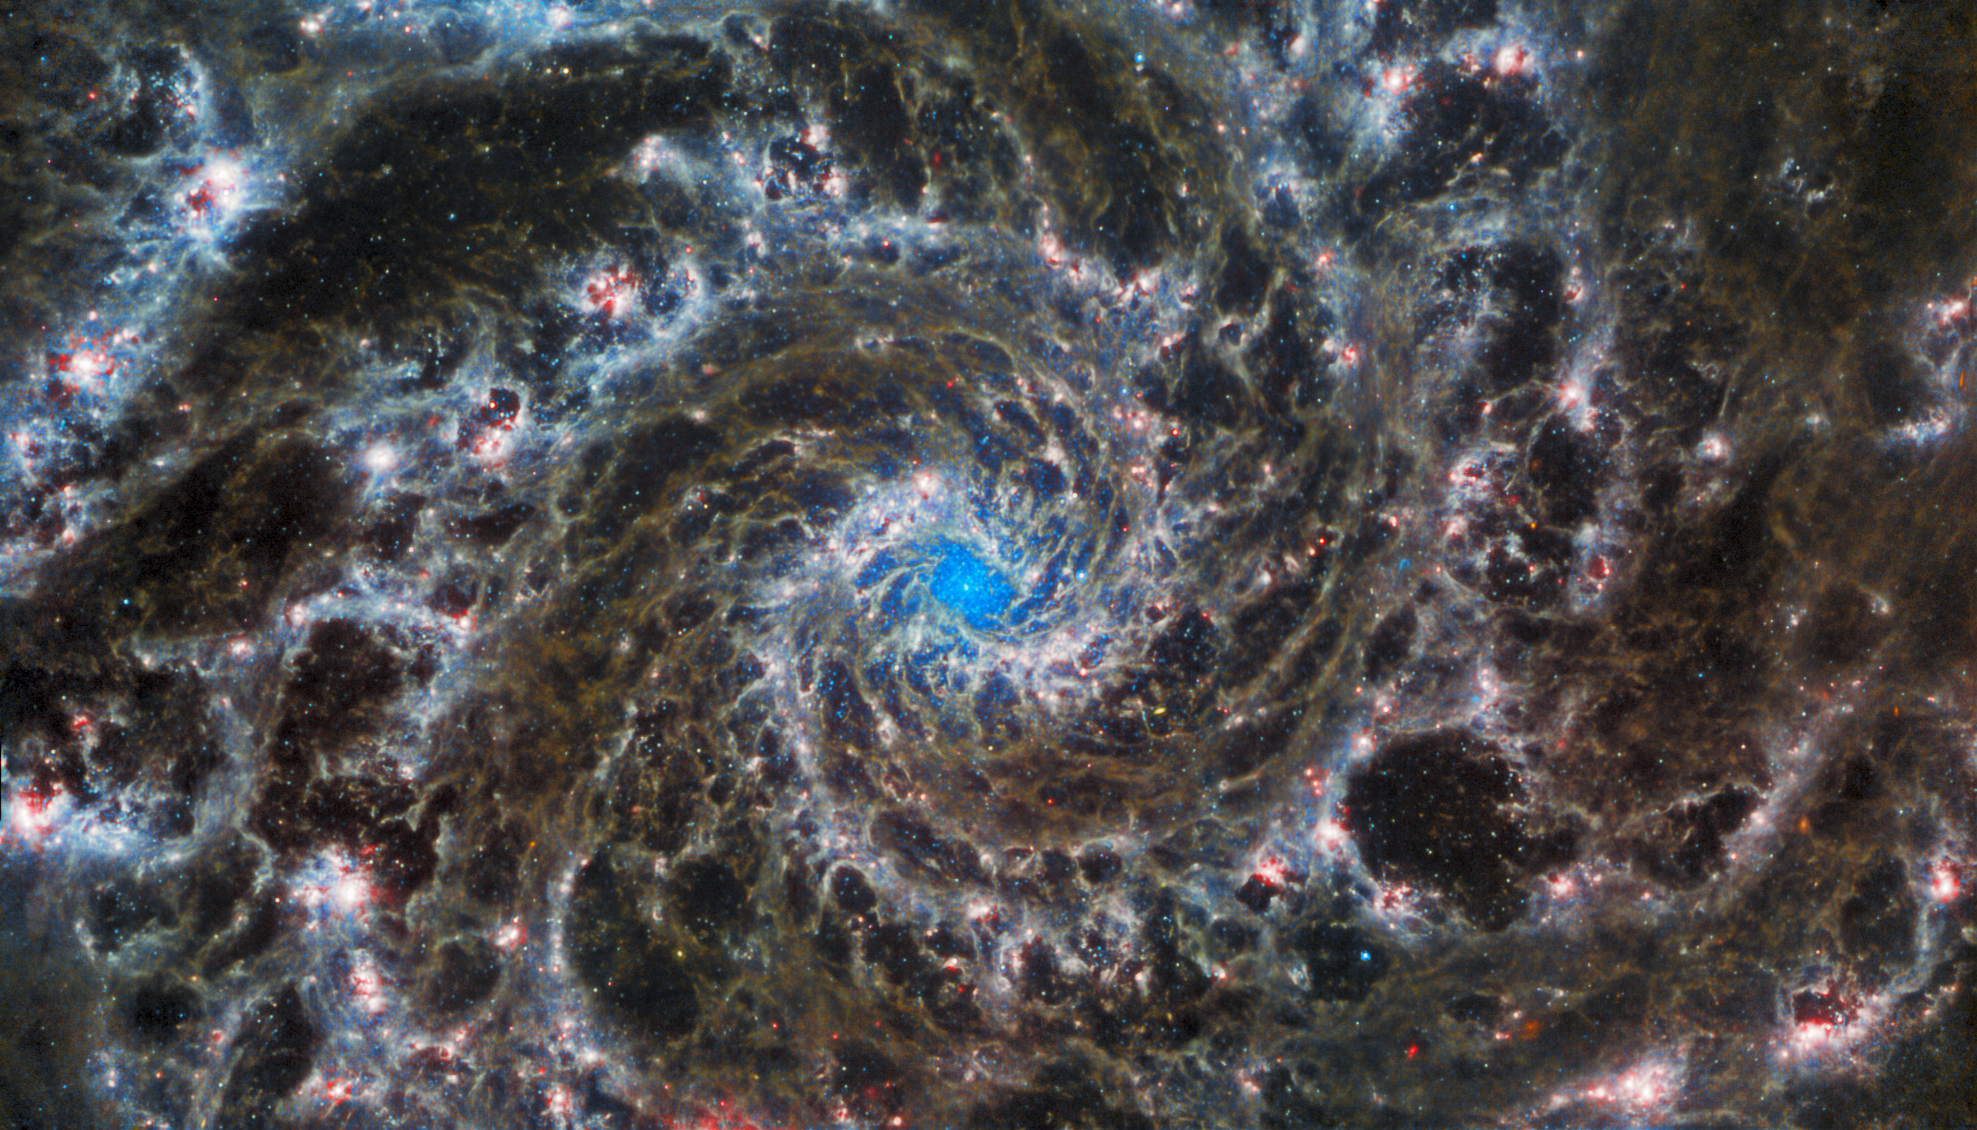

Webb Inspects the Heart of the Phantom Galaxy

This image from the NASA/ESA/CSA James Webb Space Telescope shows the heart of M74, otherwise known as the Phantom Galaxy. Webb’s sharp vision has revealed delicate filaments of gas and dust in the grandiose spiral arms which wind outwards from the centre of this image. A lack of gas in the nuclear region also provides an unobscured view of the nuclear star cluster at the galaxy's centre. M74 is a particular class of spiral galaxy known as a ‘grand design spiral’, meaning that its spiral arms are prominent and well-defined, unlike the patchy and ragged structure seen in some spiral galaxies.

The Phantom Galaxy is around 32 million light-years away from Earth in the constellation Pisces, and lies almost face-on to Earth. This, coupled with its well-defined spiral arms, makes it a favourite target for astronomers studying the origin and structure of galactic spirals.

Webb gazed into M74 with its Mid-InfraRed Instrument (MIRI) in order to learn more about the earliest phases of star formation in the local Universe. These observations are part of a larger effort to chart 19 nearby star-forming galaxies in the infrared by the international PHANGS collaboration. Those galaxies have already been observed using the NASA/ESA Hubble Space Telescope and ground-based observatories. The addition of crystal-clear Webb observations at longer wavelengths will allow astronomers to pinpoint star-forming regions in the galaxies, accurately measure the masses and ages of star clusters, and gain insights into the nature of the small grains of dust drifting in interstellar space.

Hubble observations of M74 have revealed particularly bright areas of star formation known as HII regions. Hubble’s sharp vision at ultraviolet and visible wavelengths complements Webb’s unparalleled sensitivity at infrared wavelengths, as do observations from ground-based radio telescopes such as the Atacama Large Millimeter/submillimeter Array, ALMA. By combining data from telescopes operating across the electromagnetic spectrum, scientists can gain greater insight into astronomical objects than by using a single observatory — even one as powerful as Webb!

MIRI was contributed by ESA and NASA, with the instrument designed and built by a consortium of nationally funded European Institutes (the MIRI European Consortium) in partnership with JPL and the University of Arizona.

Credit: ESA/Webb, NASA & CSA, J. Lee and the PHANGS-JWST Team. Acknowledgement: J. Schmidt